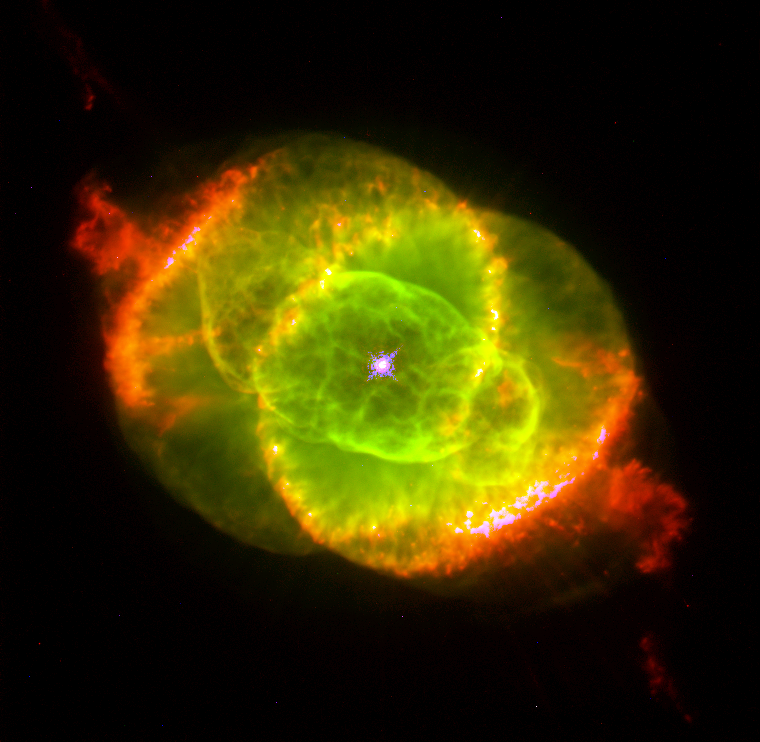

The Cat's Eye Nebula

This Hubble Space Telescope image shows one of the most complex planetary nebulae ever seen, NGC 6543, nicknamed the 'Cat's Eye Nebula.' Hubble reveals surprisingly intricate structures including concentric gas shells, jets of high-speed gas and unusual shock-induced knots of gas. Estimated to be 1,000 years old, the nebula is a visual 'fossil record' of the dynamics and late evolution of a dying star.

Credit: J.P. Harrington and K.J. Borkowski (University of Maryland), and NASA/ESA